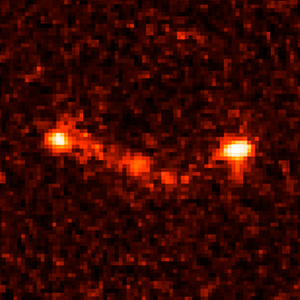

Gamma-ray burst host galaxy GRB000926

This is an image of Gamma-ray Burst Host Galaxy GRB000926. Long-duration gamma-ray bursts are powerful flashes of high-energy radiation that are sometimes seen coming from supernovae — the explosions of extremely massive stars. This image is one of a set of images taken by NASA’s Hubble Space Telescope which show the galaxies that host these bursts and could help to tell us more about their cause.

Credit: NASA, ESA, A. Fruchter (STScI), and the GOSH Collaboration